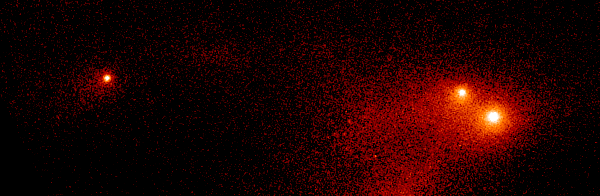

Comet P/Shoemaker-Levy 9

This image shows the "gang of four' region of Comet P/Shoemaker-Levy 9 roughly 12 months before its impact with Jupiter.

Credit: NASA & ESA